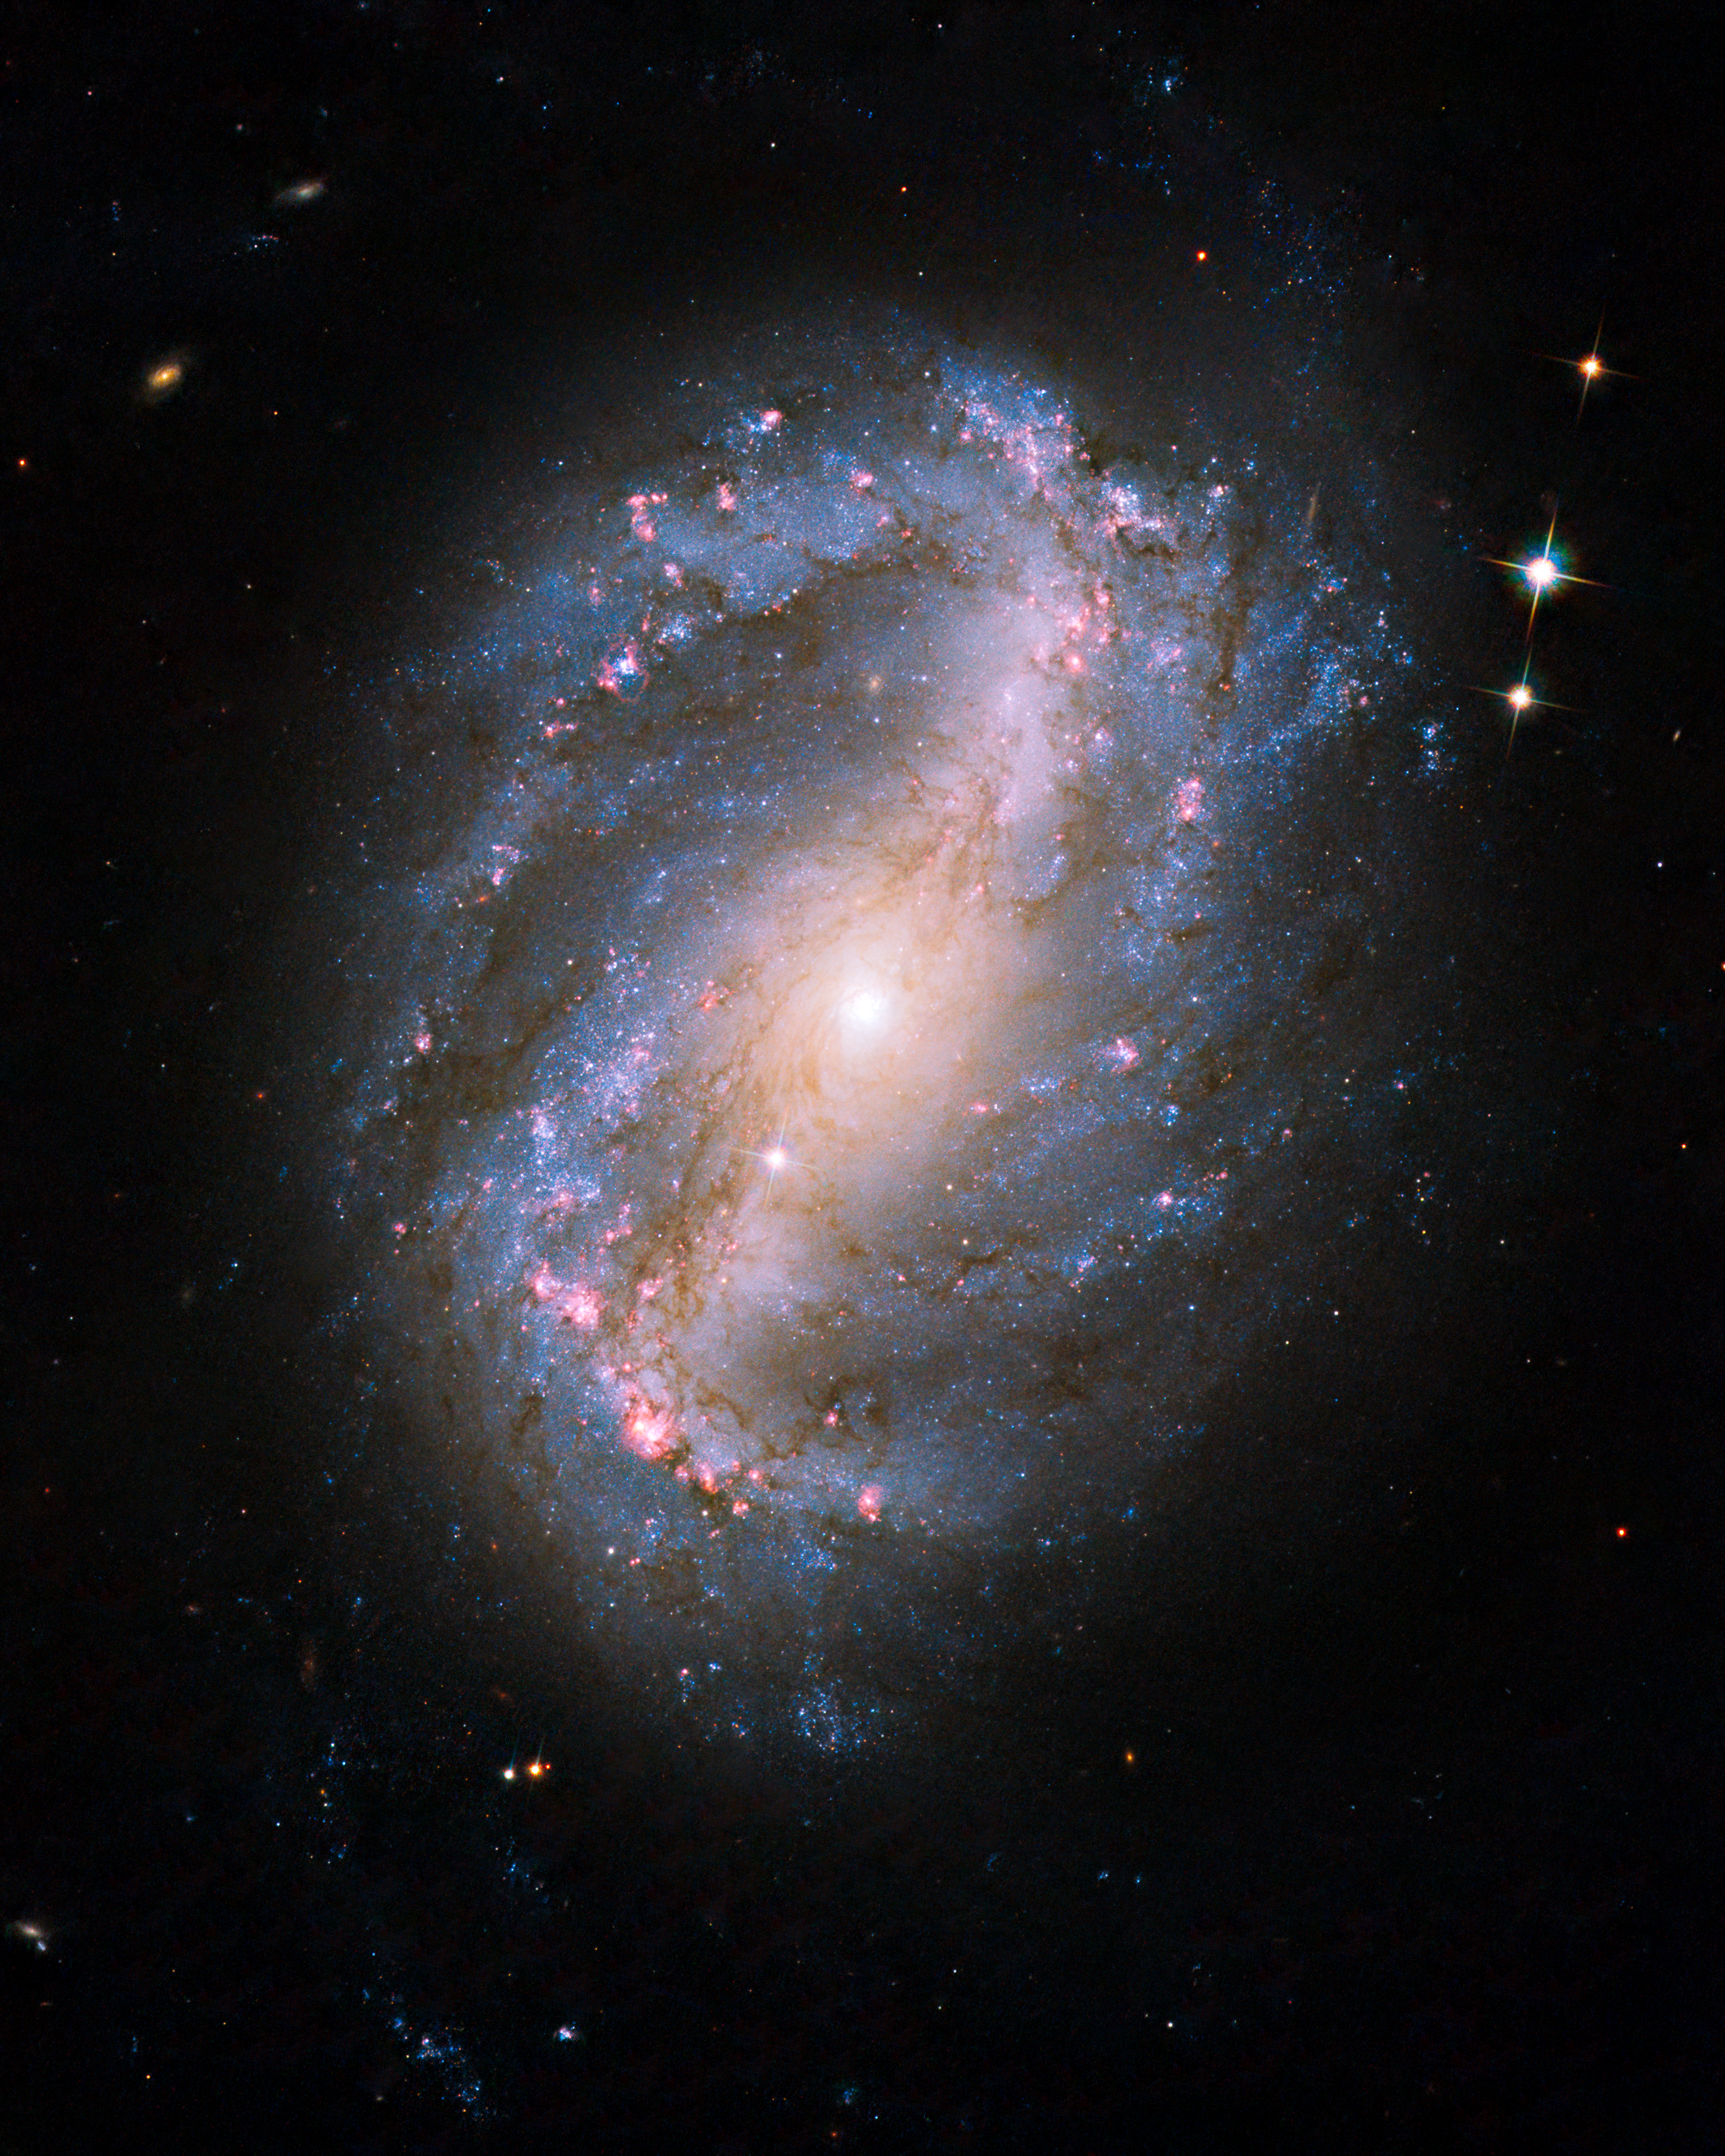

Barred spiral galaxy NGC 6217

This is the first image of a celestial object taken with the newly repaired Advanced Camera for Surveys (ACS). The camera was restored to operation during the STS-125 Servicing Mission to upgrade the NASA/ESA Hubble Space Telescope.

The barred spiral galaxy NGC 6217 was photographed on 13 June and 8 July 2009, as part of the initial testing and calibration of Hubble’s ACS. The galaxy lies up to 90 million light-years away in the north circumpolar constellation Ursa Major.

Credit: NASA, ESA and the Hubble SM4 ERO Team